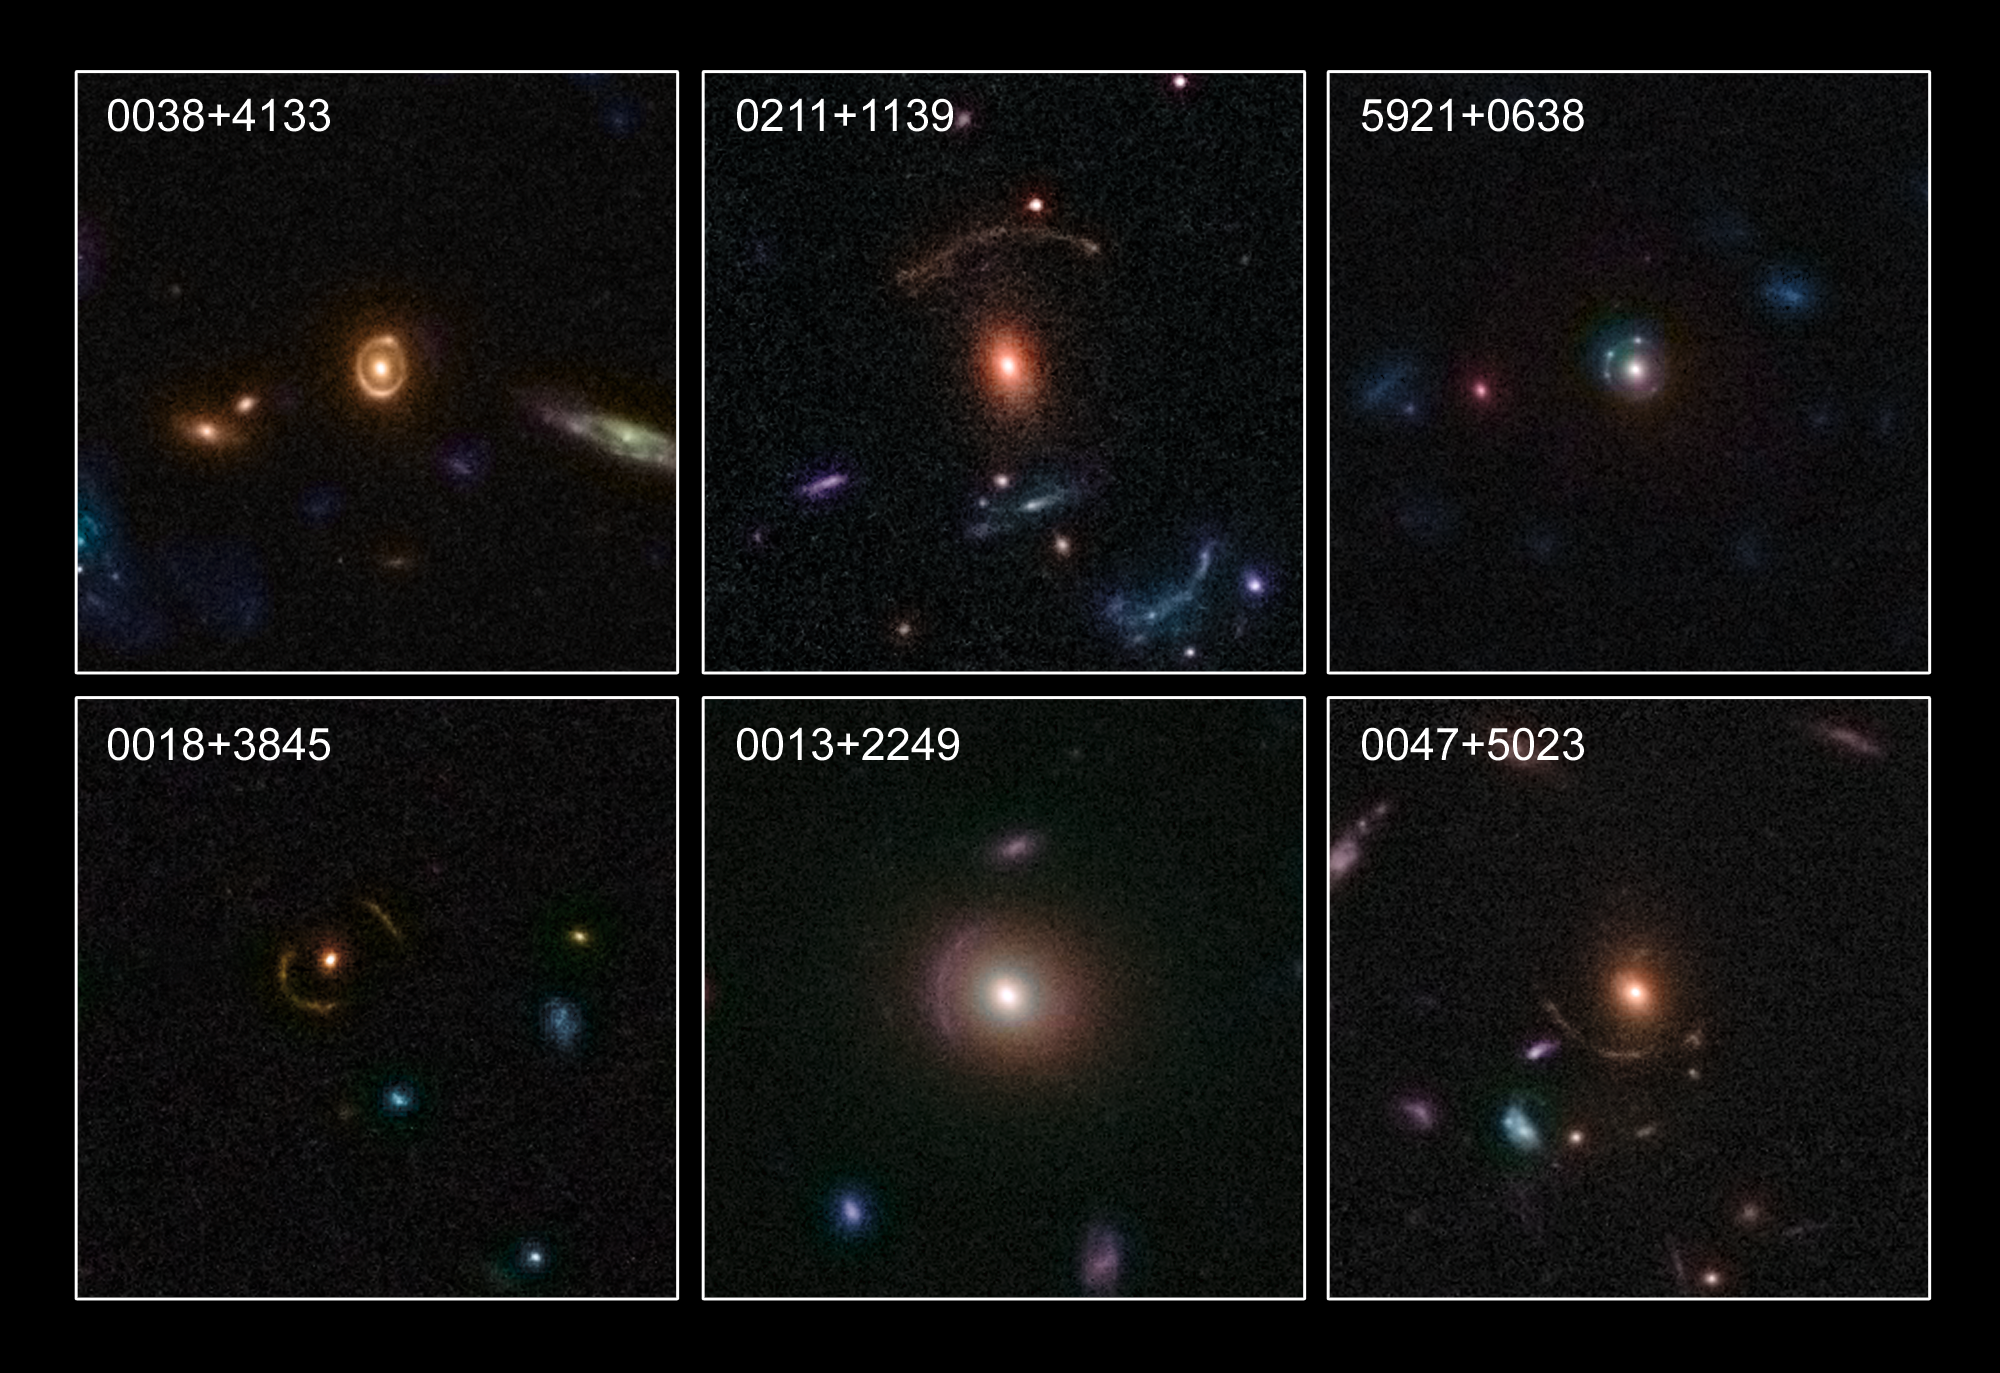

New Gravitational Lenses in the Distant Universe

In this image, six examples of the rich diversity of 67 strong gravitational lenses found in the COSMOS survey. The lenses were discovered in a recently completed, large set of observations as part of a project to survey a single 1.6-square-degree field of sky (nine times the area of the full Moon) with several space-based and Earth-based observatories.

Gravitational lenses occur when light travelling towards us from a distant galaxy is magnified and distorted as it encounters a massive object between the galaxy and us. These gravitational lenses often allow astronomers to peer much further back into the early Universe than they would normally be able to.

The COSMOS project, led by Nick Scoville at the California Institute of Technology, used observations from several observatories including the Hubble Space Telescope, the Spitzer Space Telescope, the XMM-Newton spacecraft, the Chandra X-ray Observatory, the Very Large Telescope (VLT), and the Subaru Telescope. In total 67 gravitational lenses were found.

Credit: NASA, ESA, C. Faure (Zentrum für Astronomie, University of Heidelberg) and J.P. Kneib (Laboratoire d'Astrophysique de Marseille)